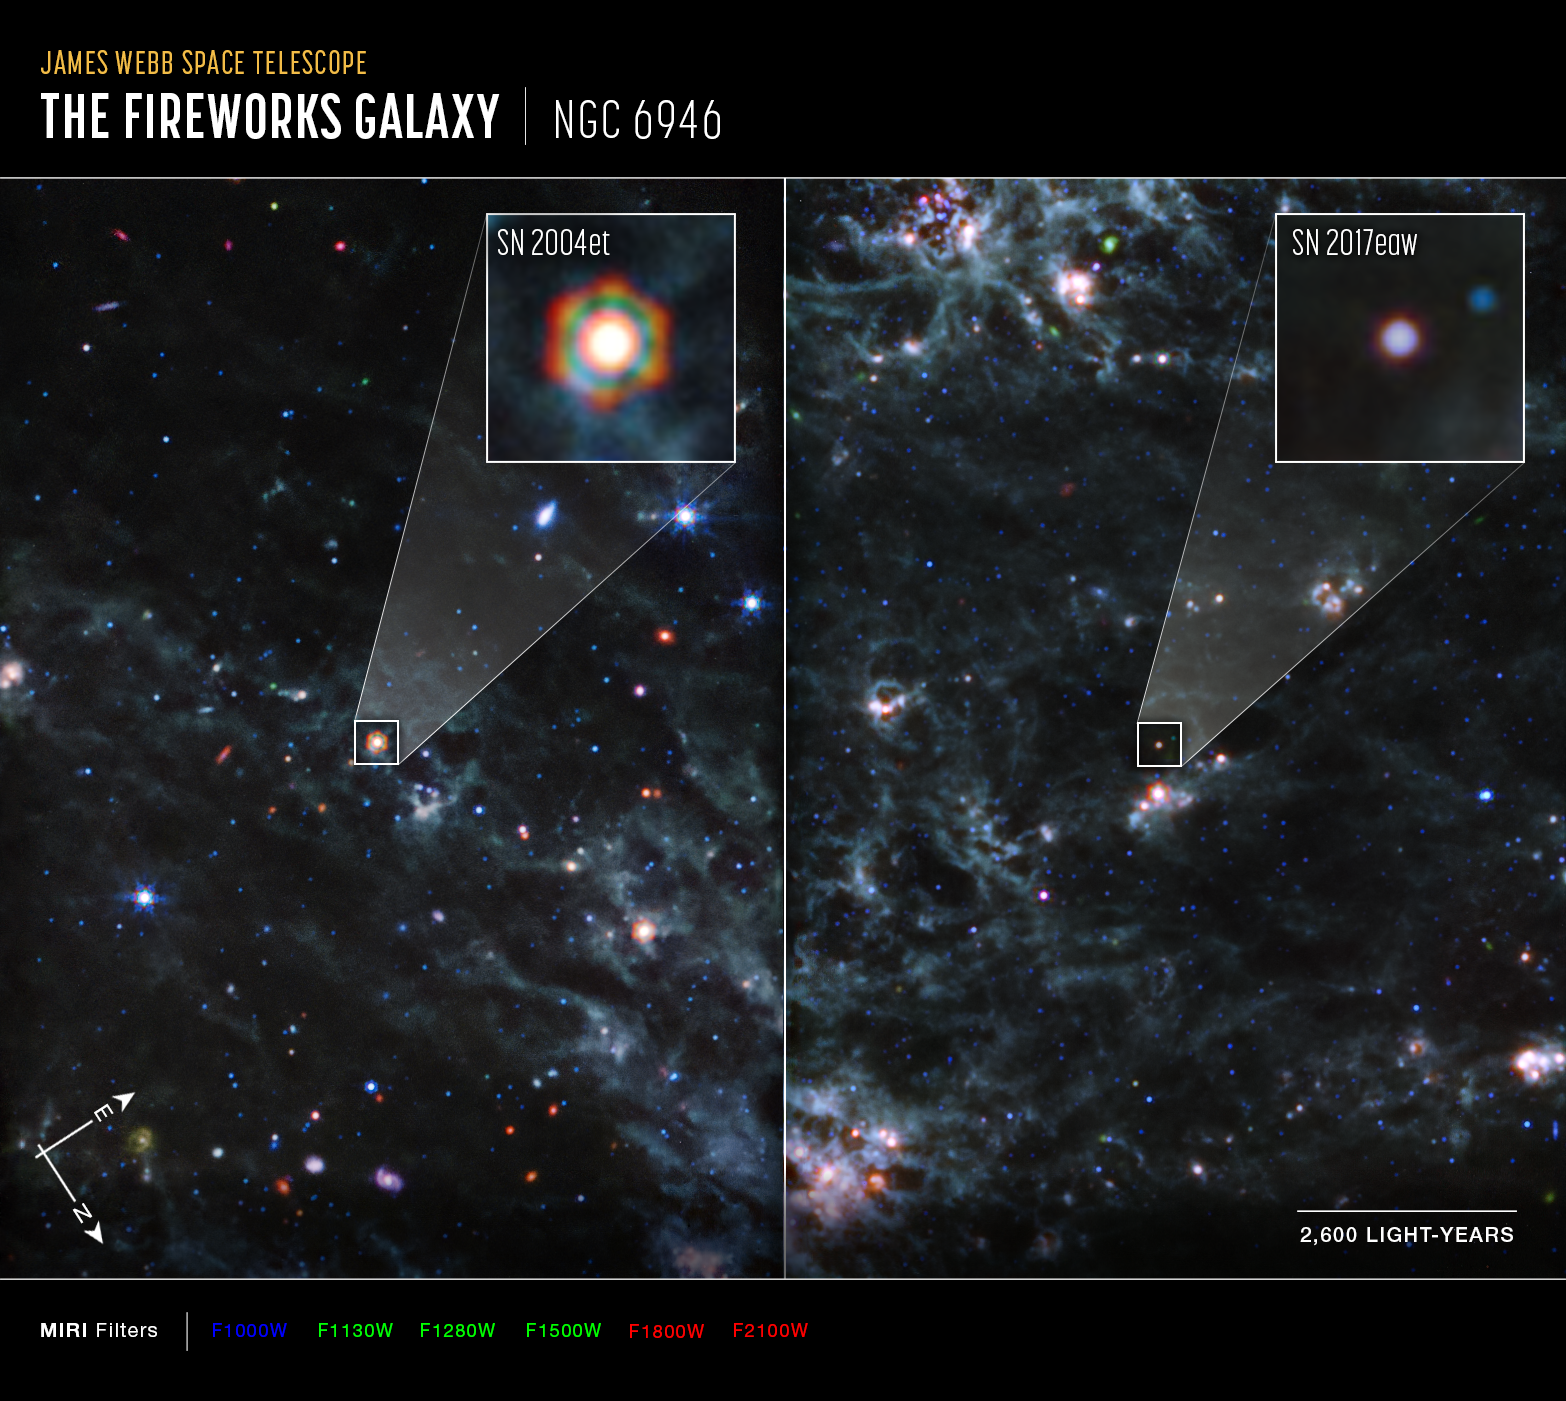

Dusty supernovae (MIRI, annotated)

Images from the NASA/ESA/CSA James Webb Space Telescope’s MIRI (Mid-Infrared Instrument) reveal large amounts of dust from two Type II supernovae, Supernova 2004et (SN2004 et) and Supernova 2017eaw (SN 2017eaw), located 22 million light-years away from Earth in spiral galaxy NGC 6946. The large amounts of dust found around these supernovae support the theory that supernovae played a key role in supplying dust to the early Universe.

SN 2004et is highlighted in the left panel of this image, and SN 2017eaw in the right panel. Webb’s exquisite sensitivity and capability to observe in the mid-infrared allow it to detect the cooler dust that survived the internal shocks reverberating in the aftermath of the dying stars’ explosions. In these images, the bluer colours indicate hotter dust, while red is cooler dust. The hexagonal shape of SN 2004et in Webb’s image is an artefact of the telescope’s mirror and struts — when the bright light of a point source is observed, the light interacts with the sharp edges of the telescope, creating diffraction spikes.

The new Webb discovery is the first breakthrough in the study of dust production from supernovae since the detection of newly formed dust in relatively nearby (170,000 light-years) Supernova 1987A.

In SN 2004et, researchers using Webb found more than 5,000 Earth masses of dust, rivalling the amount of dust found in SN 1987A. That’s why SN 2004et appears brighter and redder in Webb images. SN 2017eaw is currently hotter, with less dust (bluer in Webb observations), but in 13 years, researchers expect it to appear similar to how SN 2004et does now.

In these images, blue, green, and red were assigned to Webb’s MIRI data at 10; 11.3, 12.8, and 15; and 18 and 21 microns (F1000W; F1130W, F1280W, and F1500W; and F1800W and F2100W, respectively).

SN 2004et and SN2017eaw are the first of five targets included in this program. The observations were completed as part of Webb General Observer program 2666. The paper was published in the Monthly Notices of the Royal Astronomical Society on 5 July.

MIRI was developed as a partnership between Europe and the USA: the main partners are ESA, a consortium of nationally funded European institutes, the Jet Propulsion Laboratory (JPL), and the University of Arizona. The instrument was nationally funded by the European Consortium under the auspices of the European Space Agency. The principal investigator leading the MIRI European Consortium is Gillian Wright (UK Astronomy Technology Centre) and the MIRI American science lead is George Rieke (University of Arizona).

Credit: NASA, ESA, CSA, Ori Fox (STScI), Melissa Shahbandeh (STScI), A. Pagan (STScI)